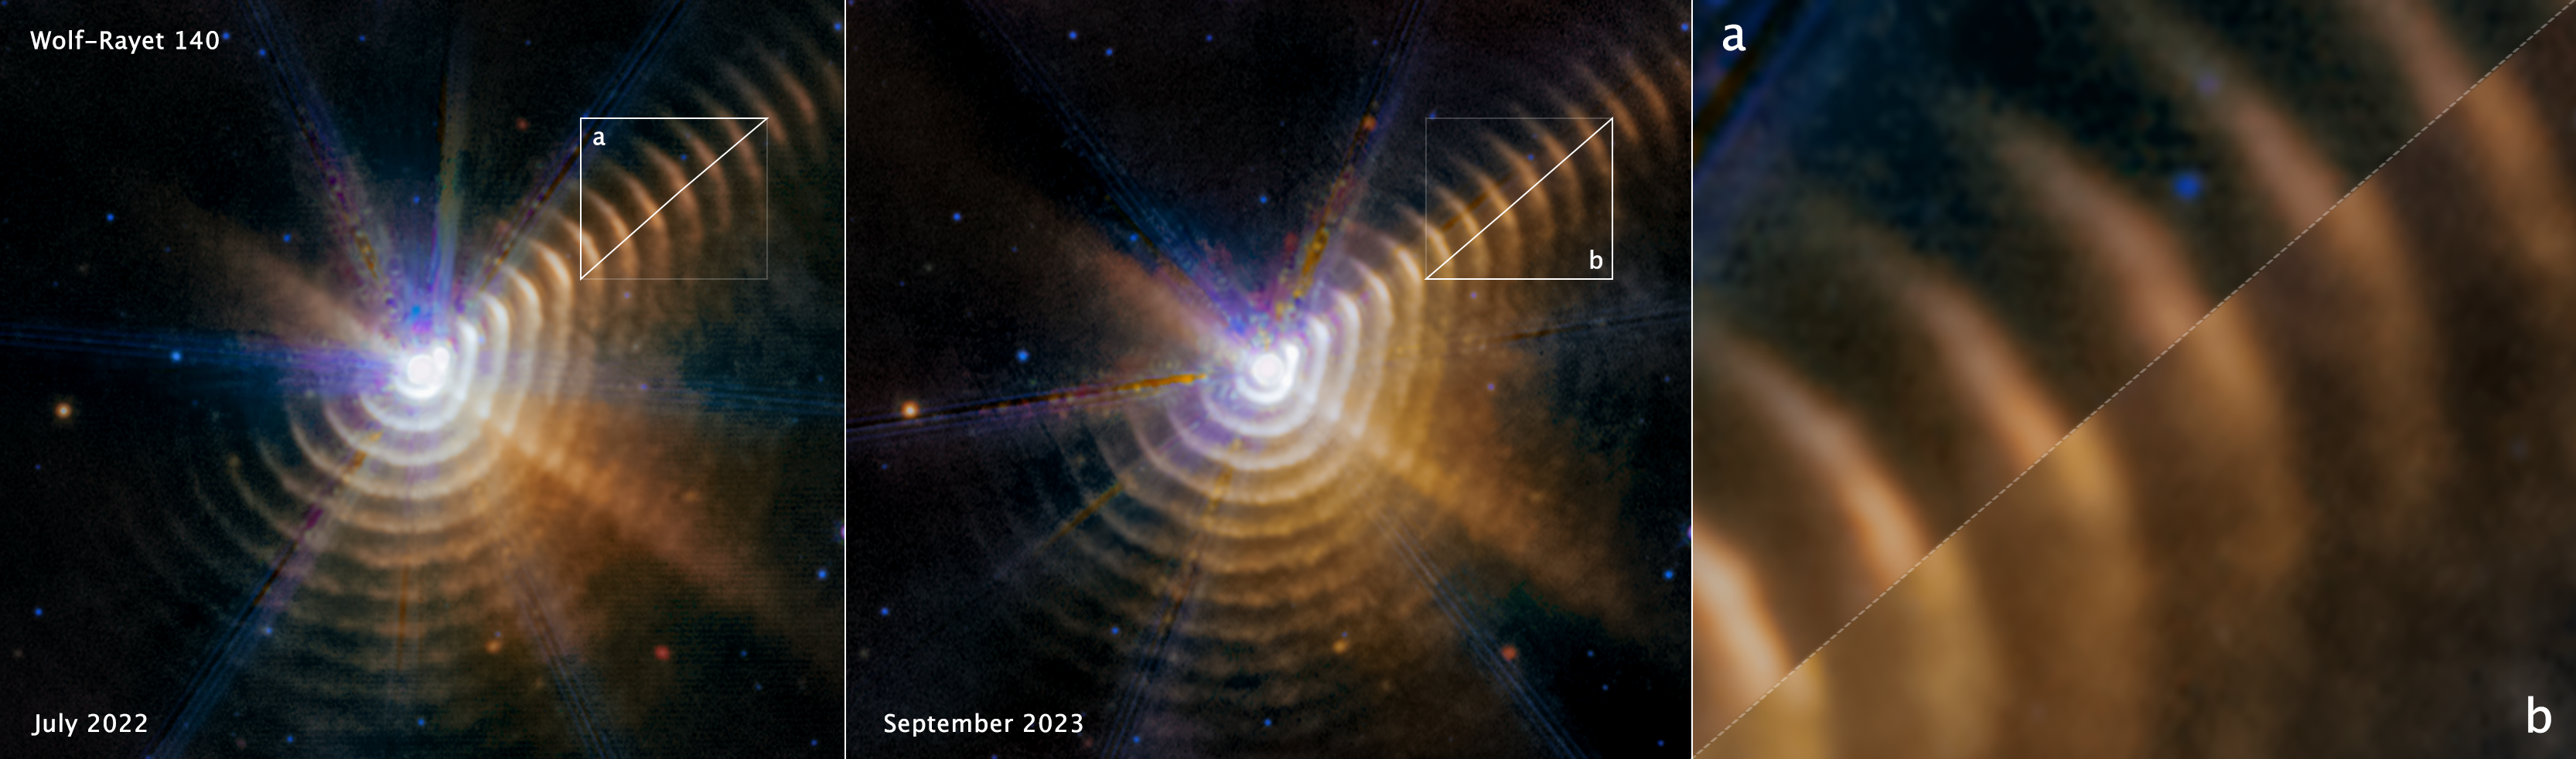

Observations of Wolf-Rayet 140 (MIRI Images, annotated)

Compare the two mid-infrared images taken by the James Webb Space Telescope of Wolf-Rayet 140, a system of dust shells ejected by two massive stars that are in an elongated orbit.

Look to the top right of the first two images. Two triangles are matched up to show how much difference 14 months makes: the dust is racing away from the central stars at almost 1% the speed of light and no longer lines up in the third image.

When the winds of the massive stars, which are buried within the white central region in the first and second images, collide and that material compresses, it forms carbon-rich dust that moves away from the stars. This occurs for a few months during each eight-year orbit, which is one reason why the dust isn’t ‘sprayed’ equally around the stars to form complete shells.

Wolf-Rayet 140 lies just over 5000 light-years away in our Milky Way galaxy.

Credit: NASA, ESA, CSA, STScI, E. Lieb (University of Denver), R. Lau (NSF NOIRLab), J. Hoffman (University of Denver)